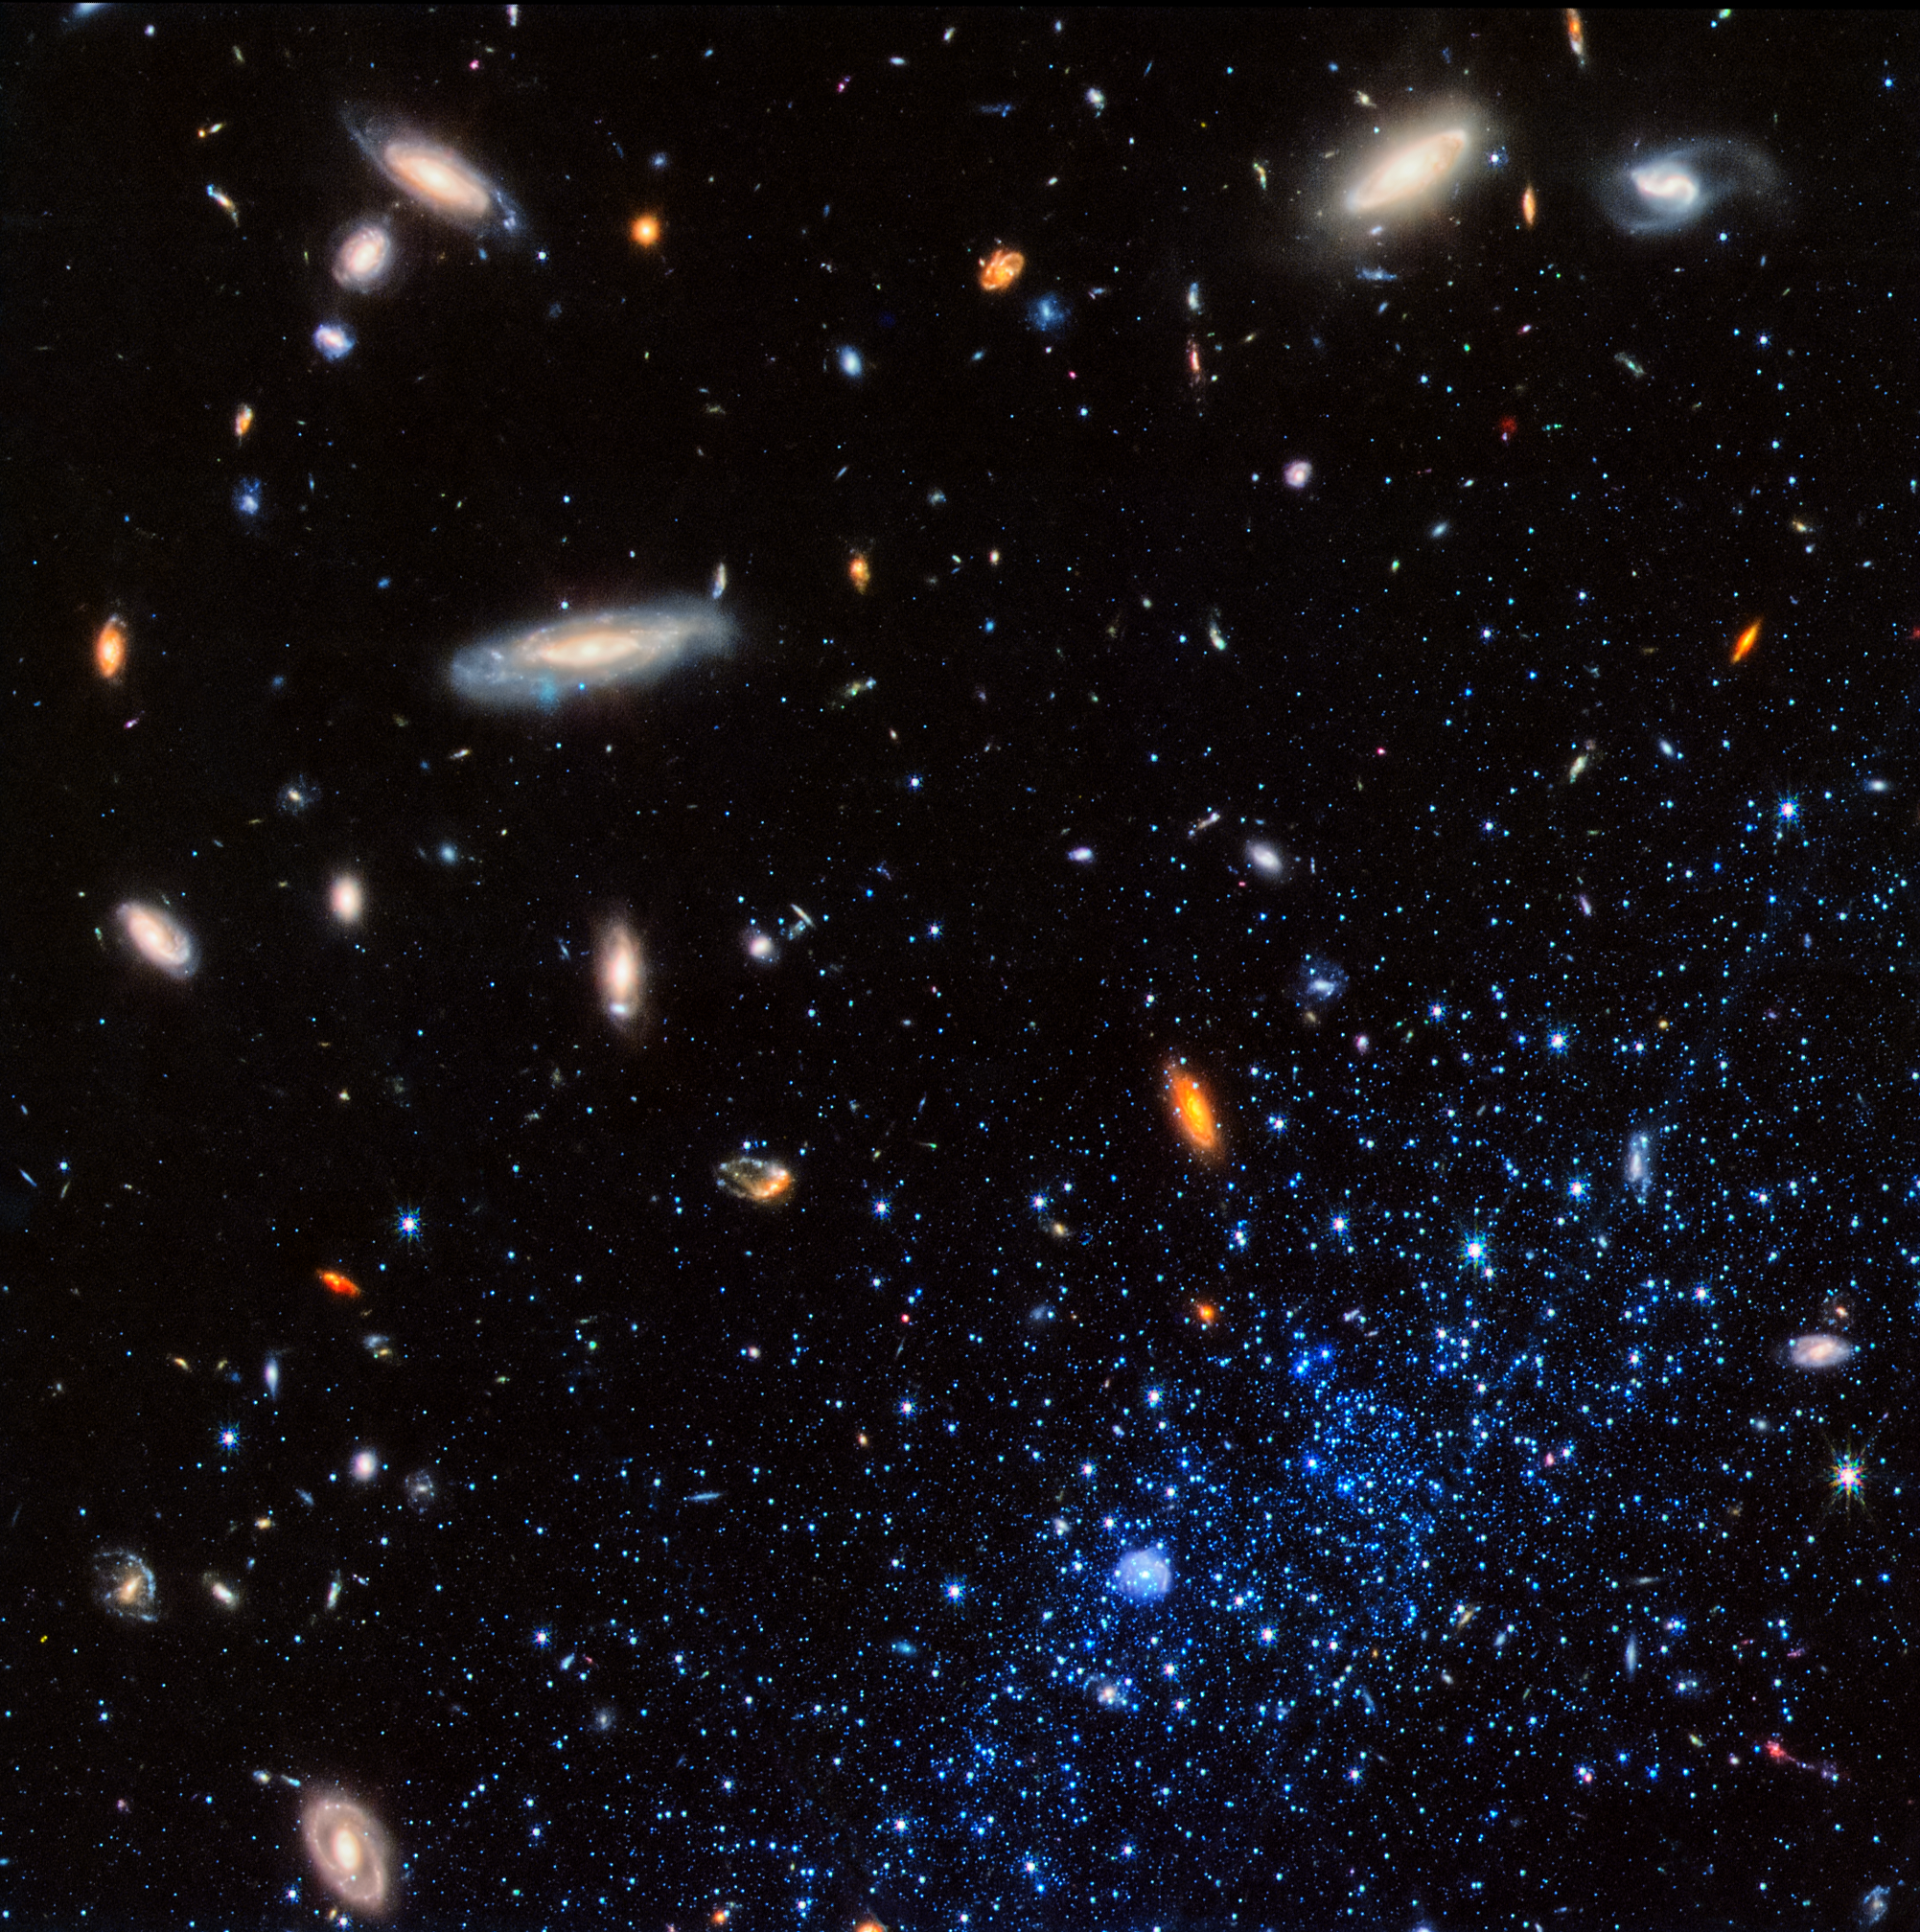

Leo P (NIRCam image)

This image from the NASA/ESA/CSA James Webb Space Telescope shows a portion of the Leo P dwarf galaxy (stars at lower right represented in blue). Leo P is a star-forming galaxy located about 5 million light-years away in the constellation Leo. A team of scientists collected data from about 15,000 stars in Leo P to deduce its star formation history. They determined that it went through three phases: an initial burst of star formation, a “pause” that lasted several billion years, and then a new round of star formation that is still continuing.

The image from Webb’s NIRCam (Near-Infrared Camera) combines infrared light at wavelengths of 0.9 microns (represented in blue), 1.5 microns (green), and 2.77 microns (red). The stars in Leo P appear blue in comparison to the background galaxies for several reasons. Young, massive stars that are common in star-forming galaxies are predominantly blue. Leo P also is extremely lacking in elements heavier than hydrogen and helium, and the resulting “metal-poor” stars tend to be bluer than Sun-like stars. A bubble-like structure at bottom center is a region of ionized hydrogen surrounding a hot, massive O-type star.

Credit: NASA, ESA, CSA, K. McQuinn (STScI), J. DePasquale (STScI)